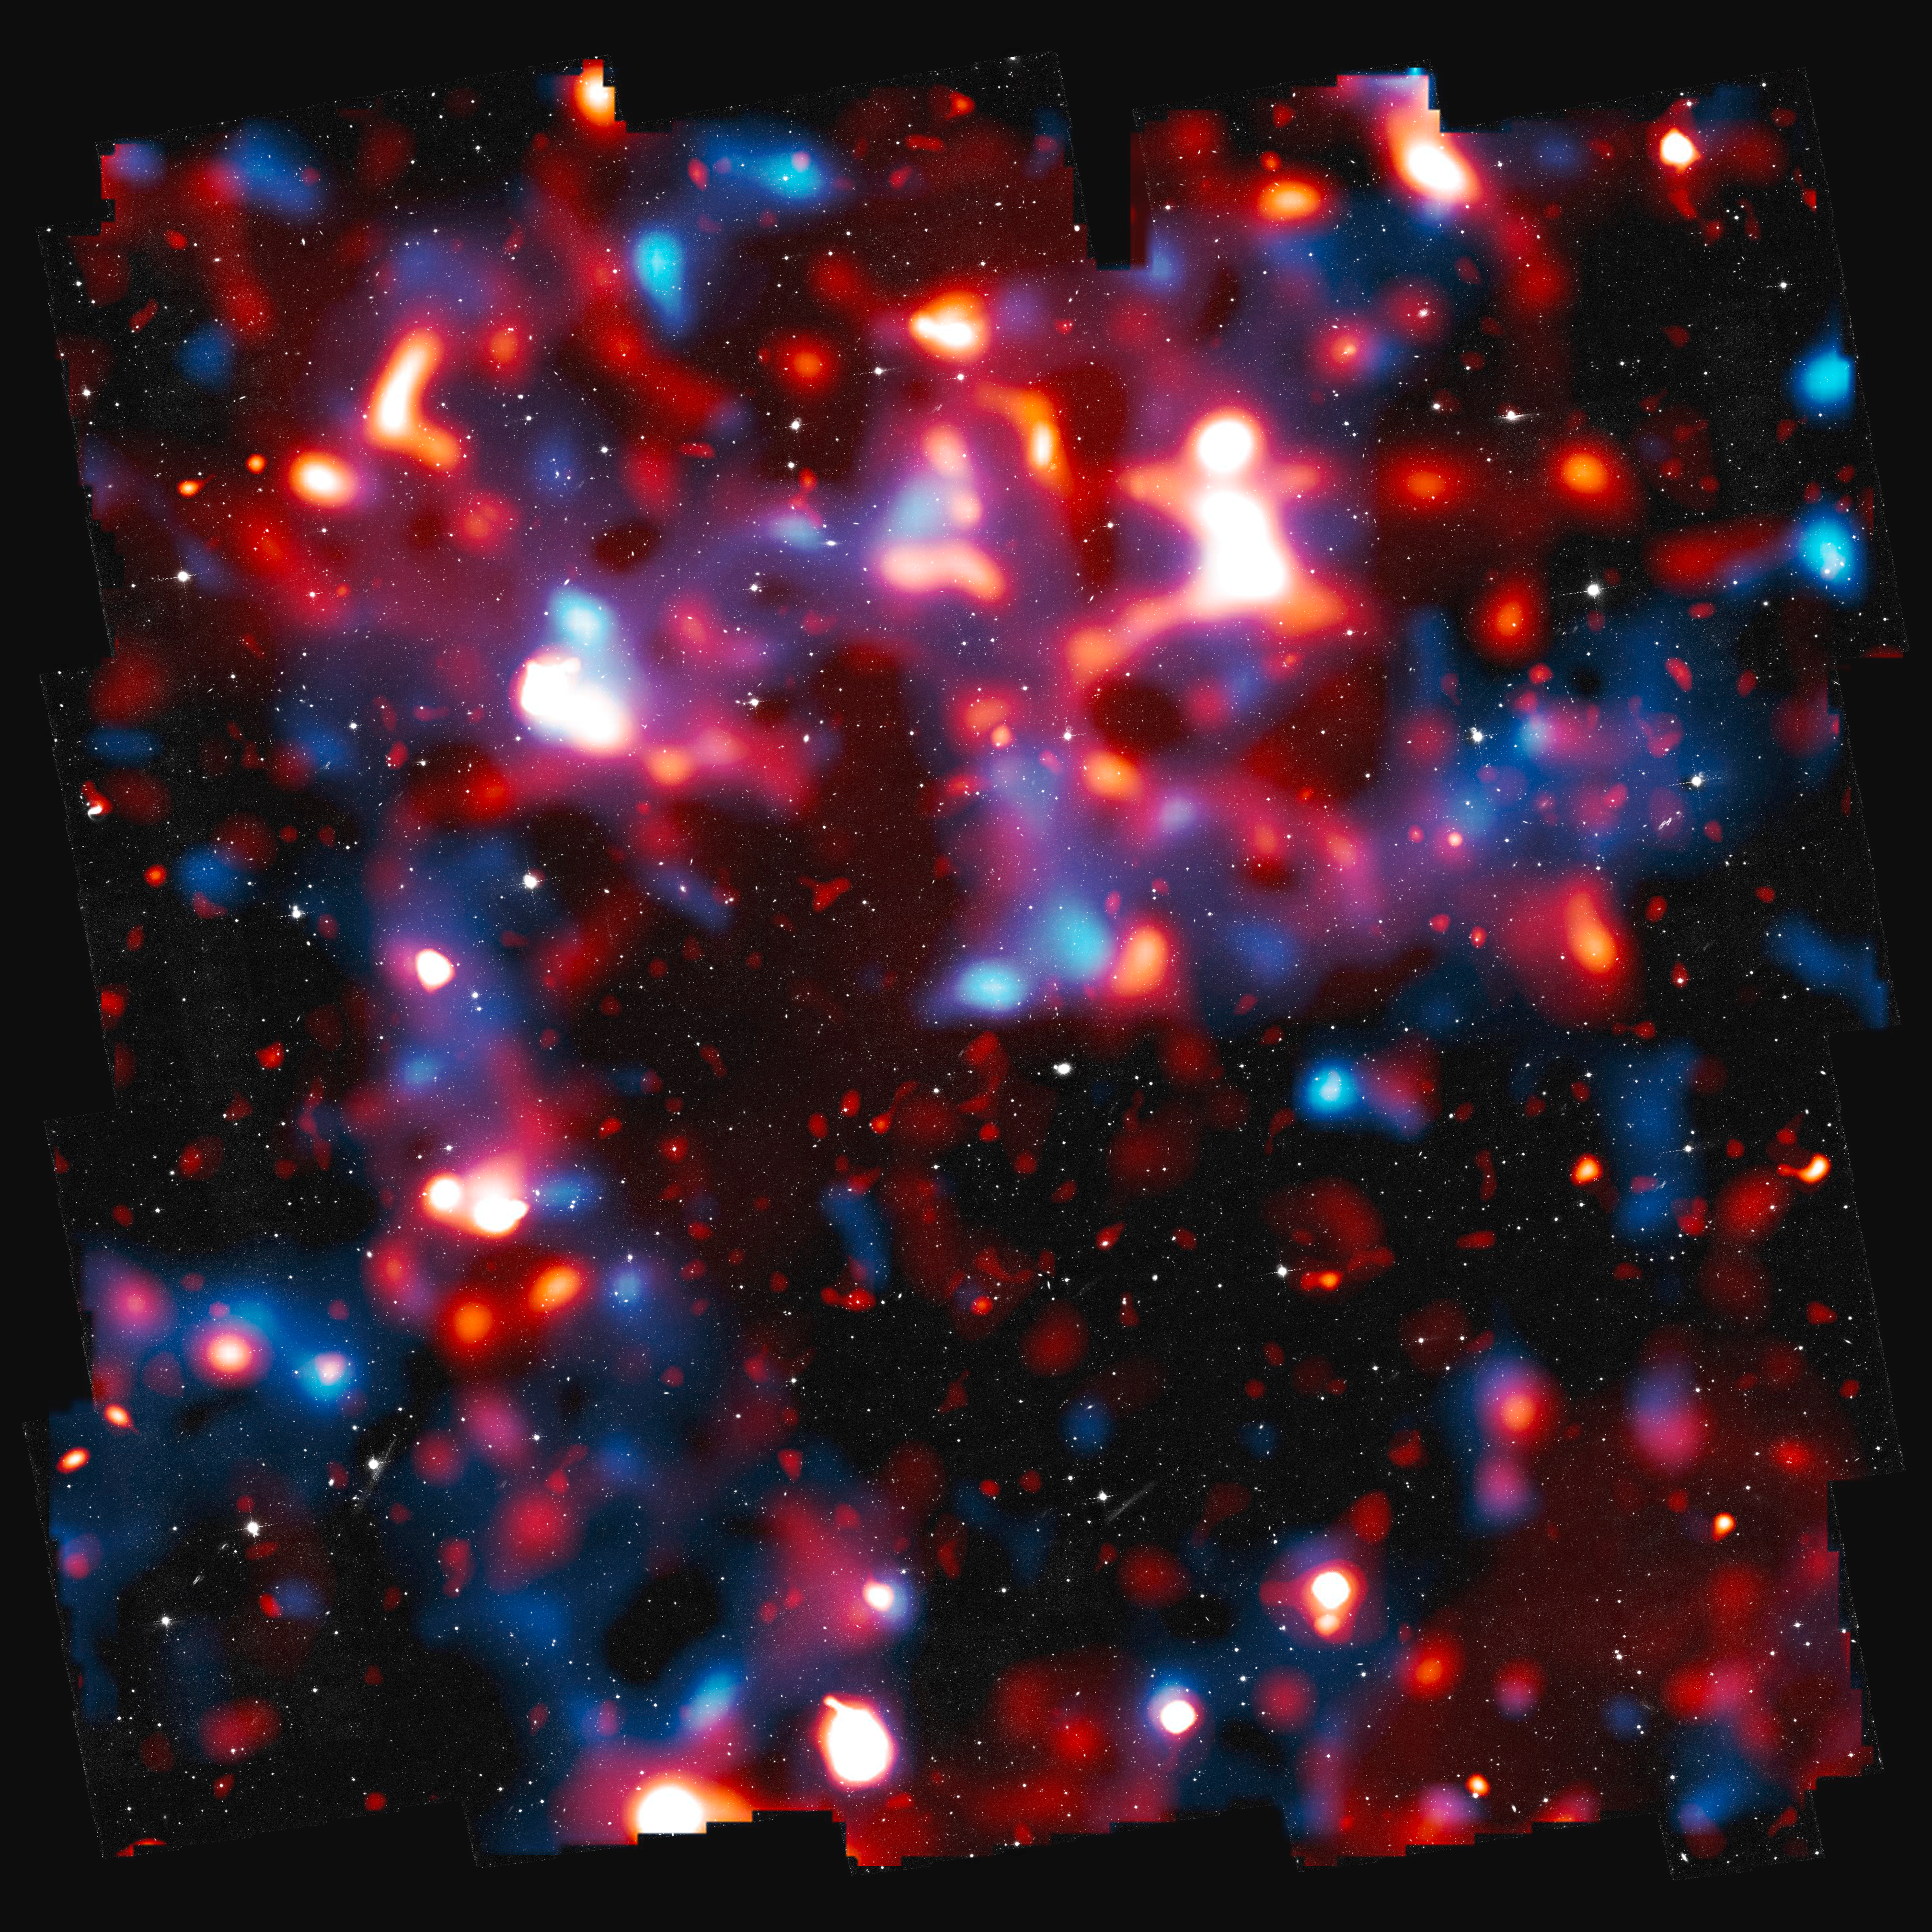

The COSMOS survey

This composite shows three different components of the COSMOS survey: The normal matter (in red) determined mainly by the European Space Agency's XMM/Newton telescope, the dark matter (in blue) and the stars and galaxies (in grey) observed in visible light with Hubble.

Credit: NASA, ESA and R. Massey (California Institute of Technology)